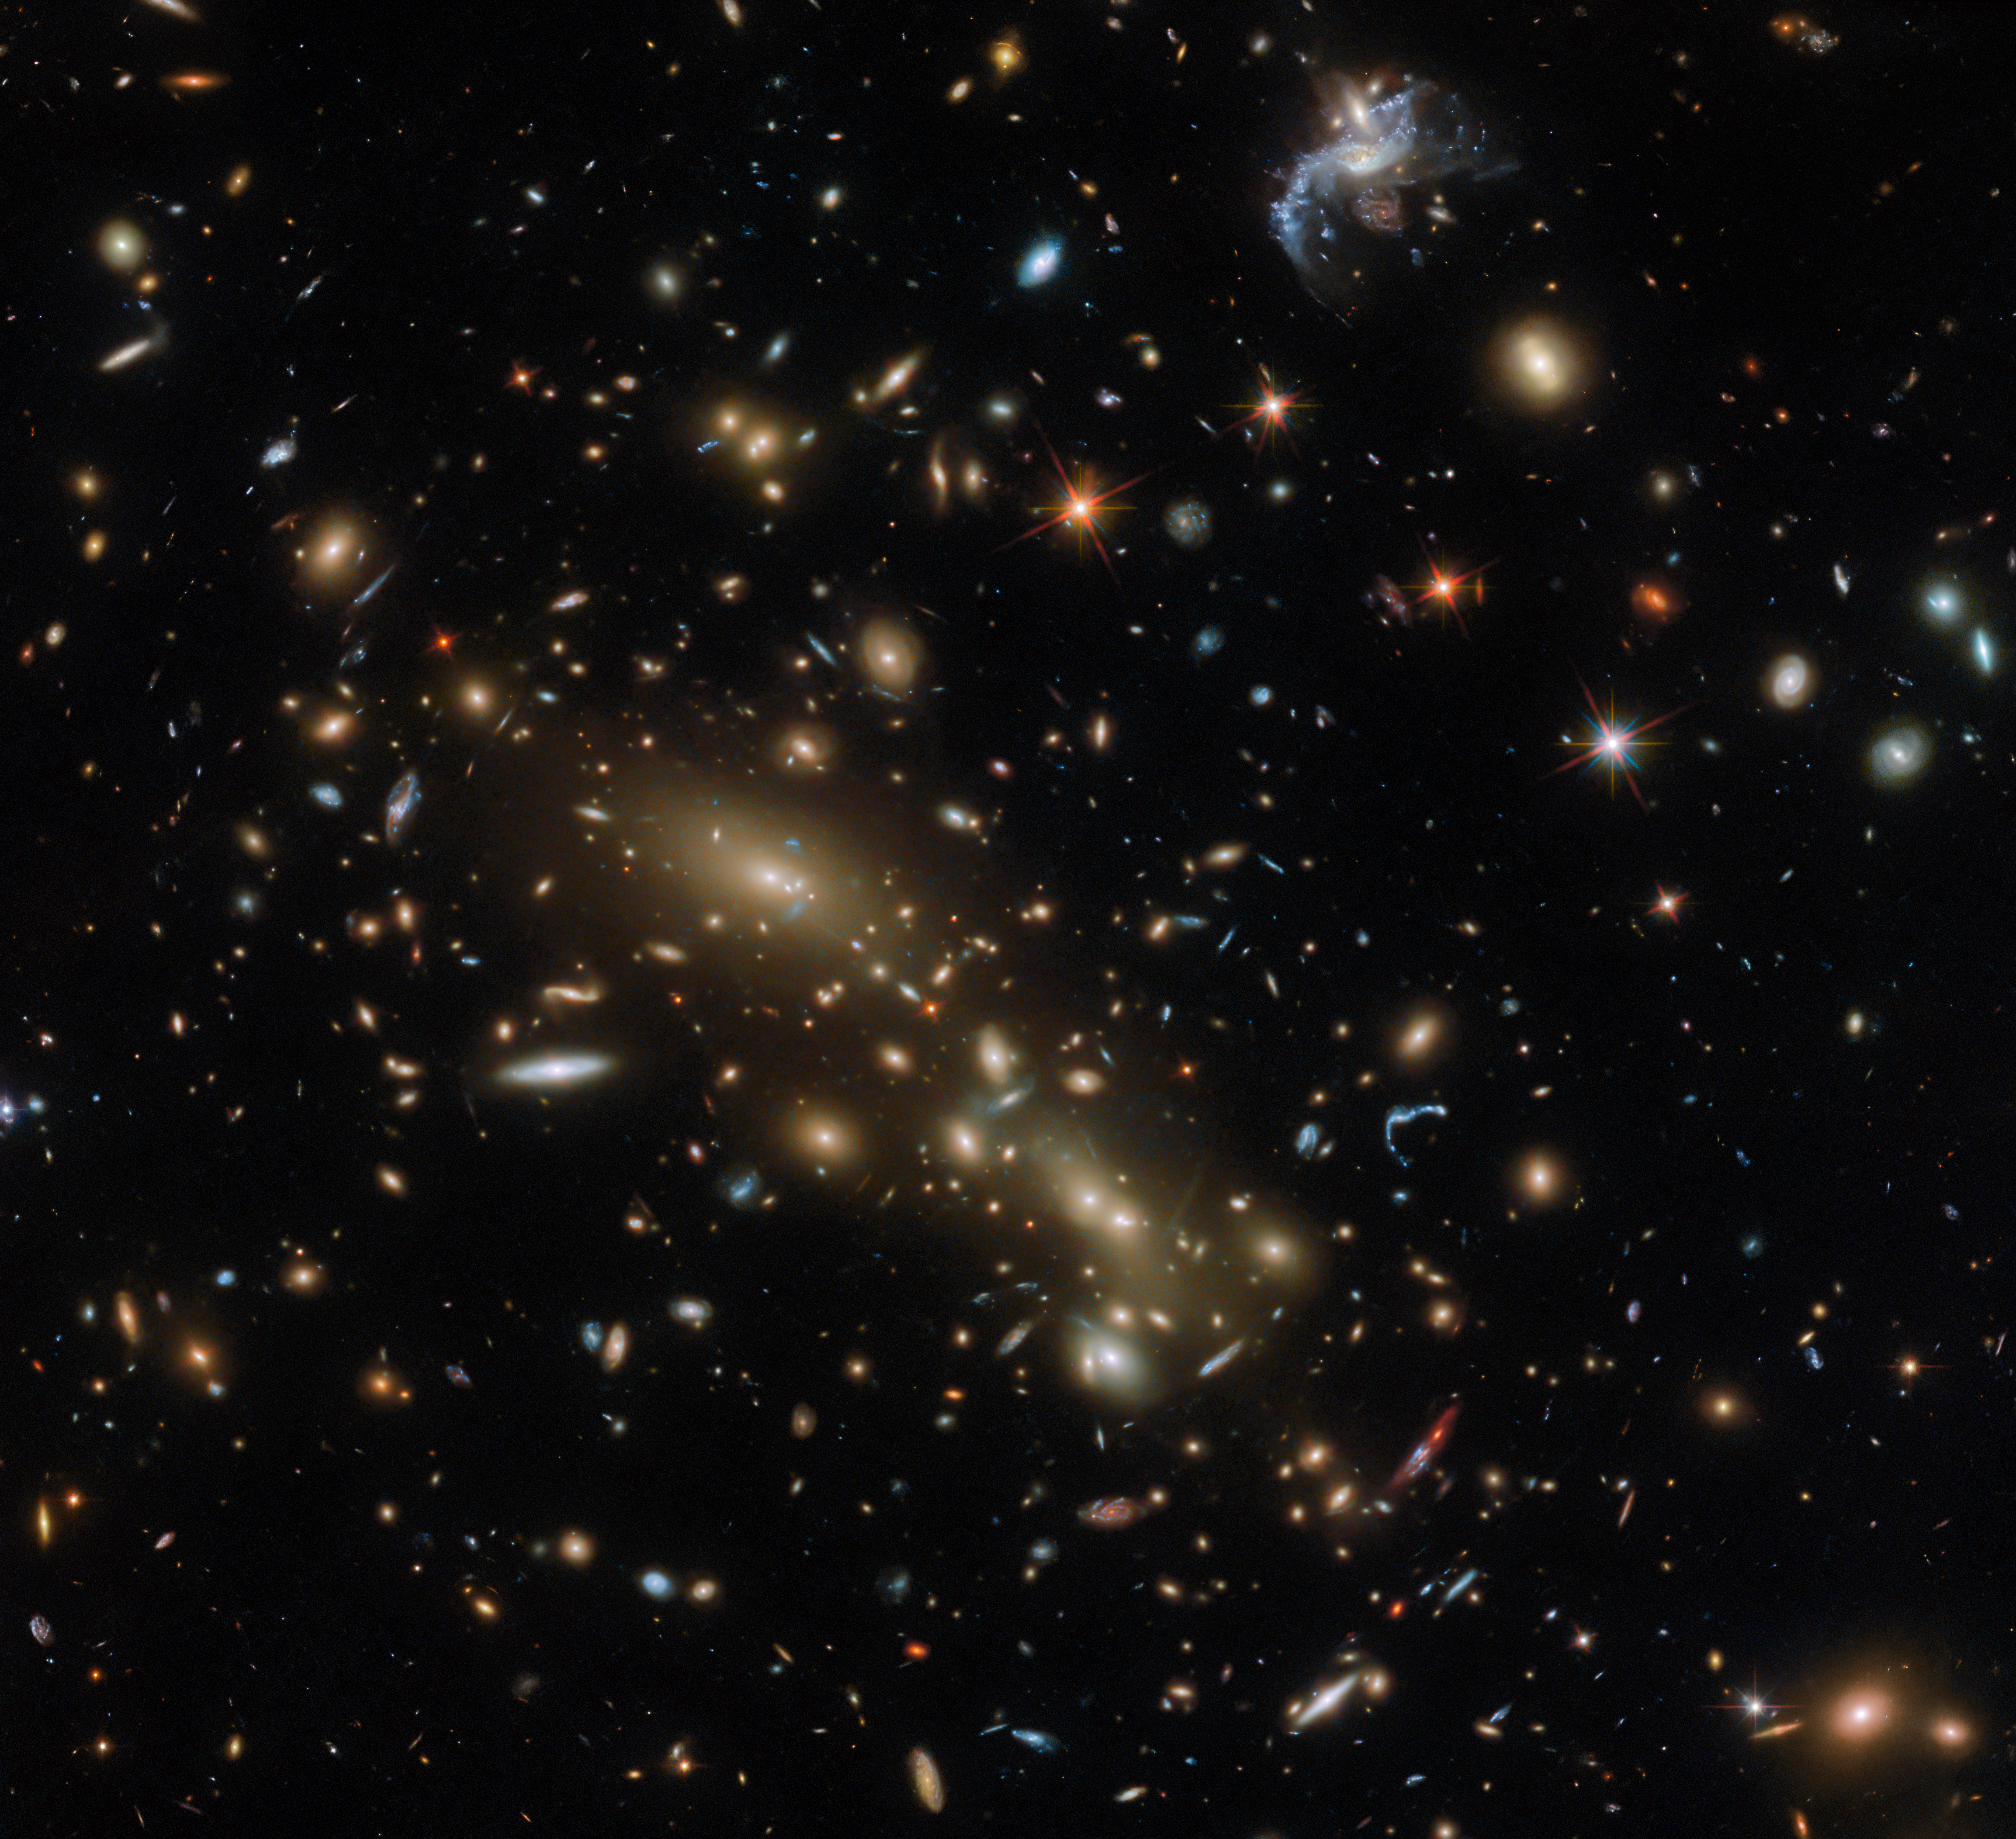

One cluster or two?

This Hubble Picture of the Week features a massive cluster of brightly glowing galaxies, first identified as Abell 3192. Like all galaxy clusters, this one is suffused with hot gas that emits powerful X-rays, and it is enveloped in a halo of invisible dark matter. All this unseen material — not to mention the many galaxies visible in this image — comprises such a huge amount of mass that the galaxy cluster noticeably curves spacetime around it, making it into a gravitational lens. Smaller galaxies behind the cluster appear distorted into long, warped arcs around the cluster’s edges.

The galaxy cluster is located in the constellation Eridanus, but the question of its distance from Earth is a more complicated one. Abell 3192 was originally documented in the 1989 update of the Abell catalogue, a catalogue of galaxy clusters that was first published in 1958. At that time, Abell 3192 was thought to comprise a single cluster of galaxies, concentrated at a single distance. However, further research revealed something surprising: the cluster’s mass seemed to be densest at two distinct points rather than one.

It was subsequently shown that the original Abell cluster actually comprised two independent galaxy clusters — a foreground group around 2.3 billion light-years from Earth, and a further group at the greater distance of about 5.4 billion light-years from our planet. The more distant galaxy cluster, included in the Massive Cluster Survey as MCS J0358.8-2955, is central in this image. The two galaxy groups are thought to have masses equivalent to around 30 trillion and 120 trillion times the mass of the Sun, respectively. Both of the two largest galaxies at the centre of this image are part of MCS J0358.8-2955; the smaller galaxies you see here, however, are a mixture of the two groups within Abell 3192.

Credit: ESA/Hubble & NASA, G. Smith, H. Ebeling, D. Coe